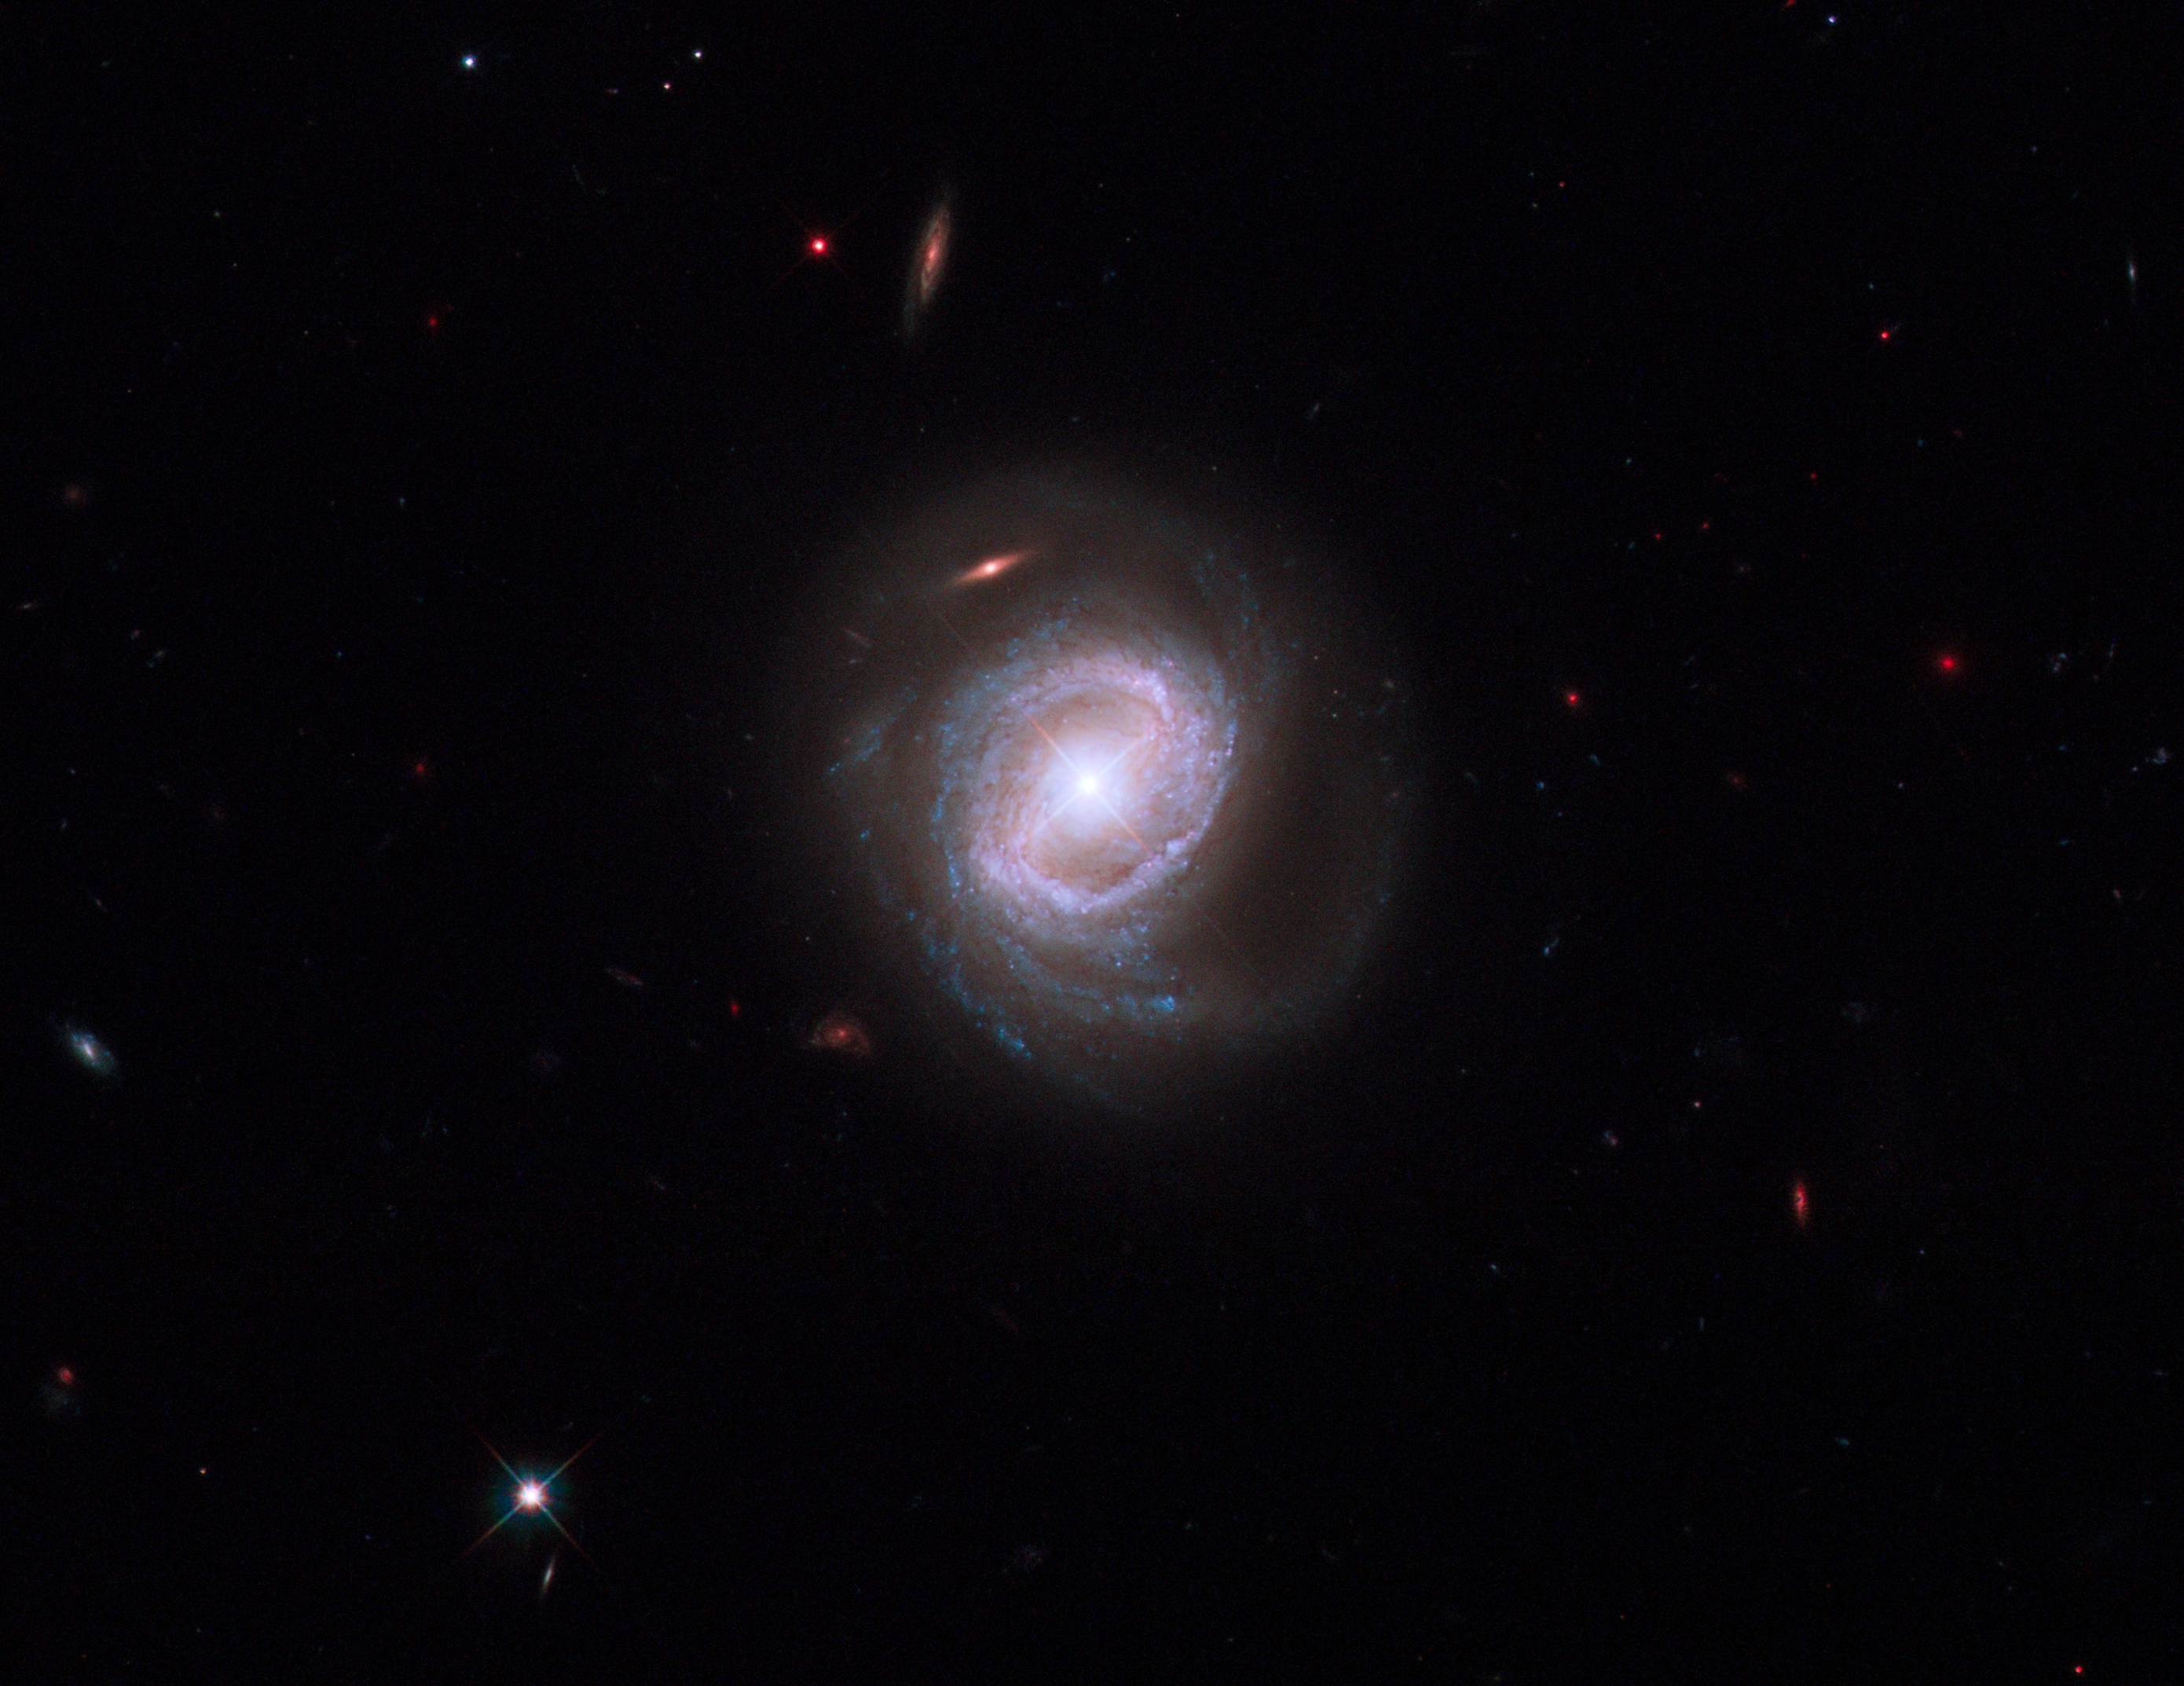

Capturing the spectacular outflow from Markarian 817

Rings of brilliant blue stars encircle the bright, active core of this spiral galaxy, whose monster black hole is blasting material into space at over 14 million kilometres per hour. Viewed nearly face-on, the galaxy, called Markarian 817, shows intense star-forming regions and dark bands of interstellar dust along its spiral arms.

Observations by the new Cosmic Origins Spectrograph (COS) aboard the NASA/ESA Hubble Space Telescope captured the powerful outflow of material from this galaxy.

The COS spectrum of Markarian 817 highlights the outflow's dynamic nature. A gas cloud containing hydrogen that was detected in Hubble data taken in 1997 does not appear in the COS observation because the cloud has apparently been driven out by an outflow of material from the galaxy.

This discharge is being powered by a huge disc of matter encircling the supermassive black hole, which is 40 million times more massive than our Sun. The disc is driving the material out of the galaxy through powerful winds, produced by streams of charged particles. Some of the outflow rains back onto the galaxy. The rest settles into the intergalactic gas.

Astronomers want to know how much of the outflow lands in the galaxy and how much escapes into intergalactic space. To achieve this, they need high-quality spectroscopic observations to detect the signatures of the outflowing material, which includes carbon, nitrogen and oxygen. This will allow them to determine the composition, location and dynamics of the winds that distribute the material.

Markarian 817 is 430 million light-years away in the northern constellation of Draco. COS observed the galaxy on 4 August 2009, using its far-ultraviolet detector to distinguish the outflow from the galaxy’s core. NASA astronauts installed COS during Servicing Mission 4 in May to upgrade and repair the 19-year-old Hubble.

The Hubble image was taken with the Wide Field Camera 3 on 2 August 2009. The composite image was made by using filters that isolate light from the blue, green and infrared portions of the spectrum, as well as emission from glowing hydrogen.

The Hubble observations are part of the Hubble Servicing Mission 4 Early Release Observations.

Credit: NASA, ESA and the Hubble SM4 ERO Team